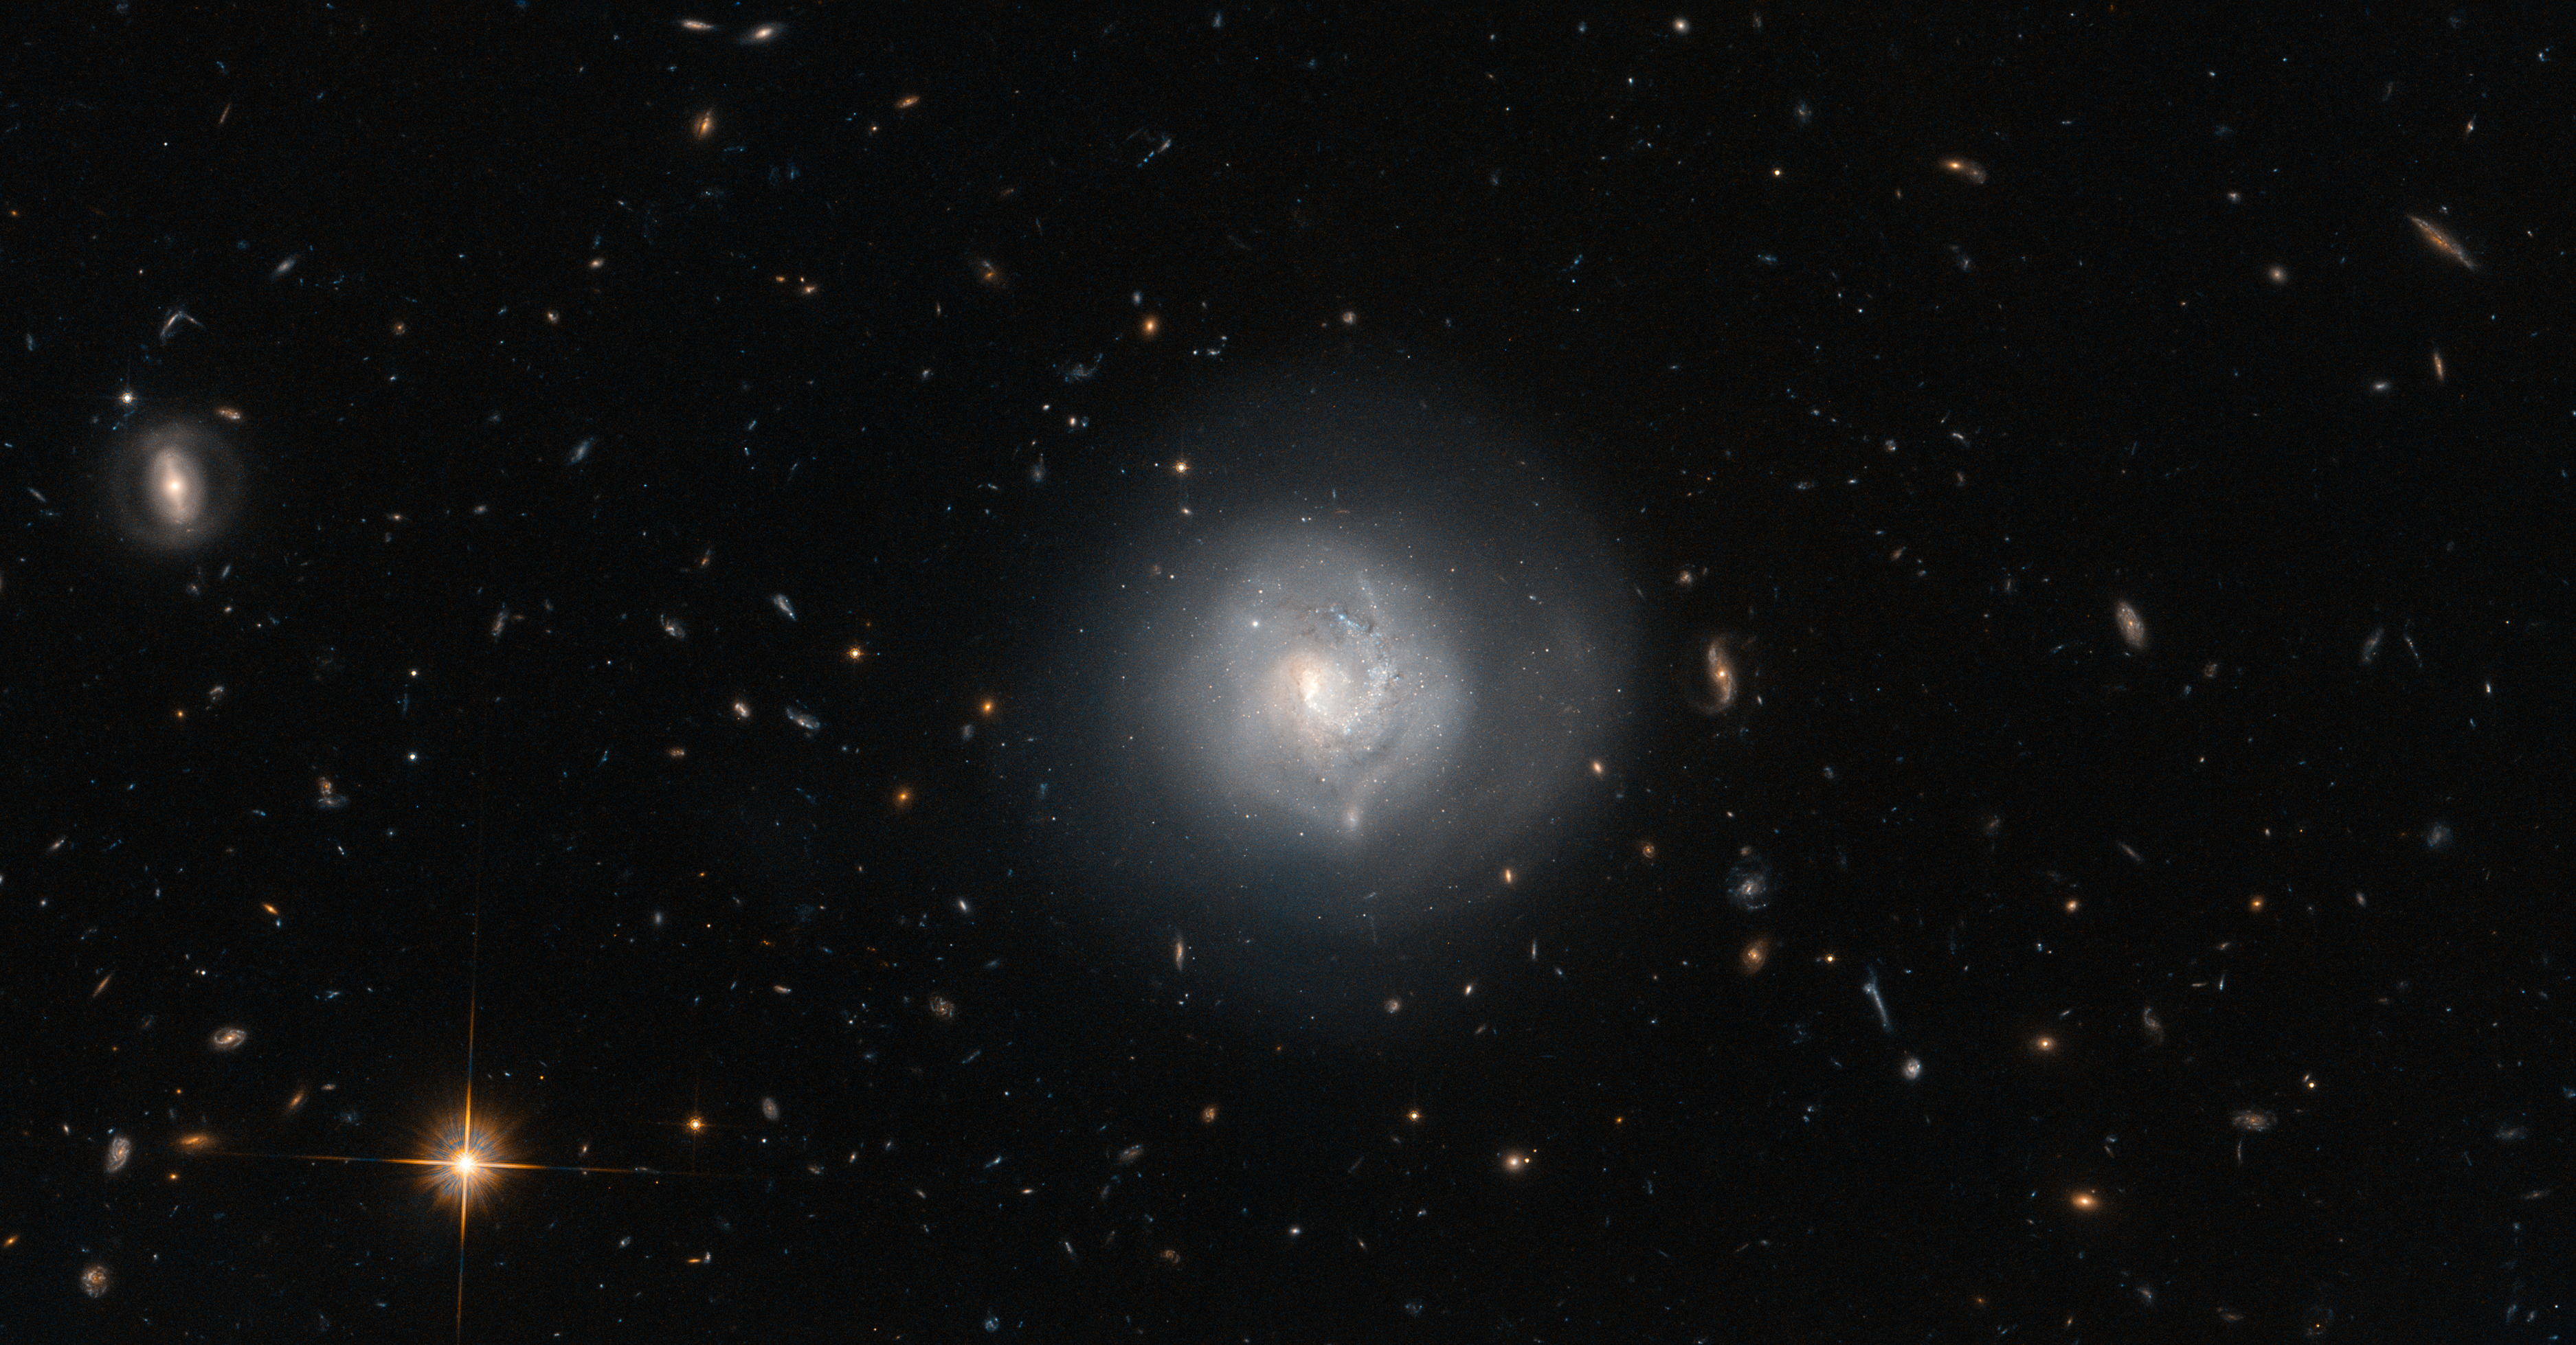

At the centre of the tuning fork

This galaxy is known as Mrk 820 and is classified as a lenticular galaxy — type S0 on the Hubble Tuning Fork. The Hubble Tuning Fork is used to classify galaxies according to their morphology. Elliptical galaxies look like smooth blobs in the sky and lie on the handle of the fork. They are arranged along the handle based on how elliptical they are, with the more spherical galaxies furthest from the tines of the fork, and the more egg-shaped ones closest to the end of the handle where it divides. The two prongs of the tuning fork represent types of unbarred and barred spiral galaxies.

Lenticular galaxies like Mrk 820 are in the transition zone between ellipticals and spirals and lie right where the fork divides. A closer look at the appearance of Mrk 820 reveals hints of a spiral structure embedded in a circular halo of stars.

Surrounding Mrk 820 in this image is good sampling of other galaxy types, covering almost every type found on the Hubble Tuning Fork, both elliptical and spiral. Most of the smears and specks are distant galaxies, but the prominent bright object at the bottom is a foreground star called TYC 4386-787-1.

A version of this image was entered into the Hubble's Hidden Treasures image processing competition by contestant Judy Schmidt.

Credit: ESA/Hubble & NASA and N. Grogin (STScI) Acknowledgement: Judy Schmidt (http://www.geckzilla.com/)